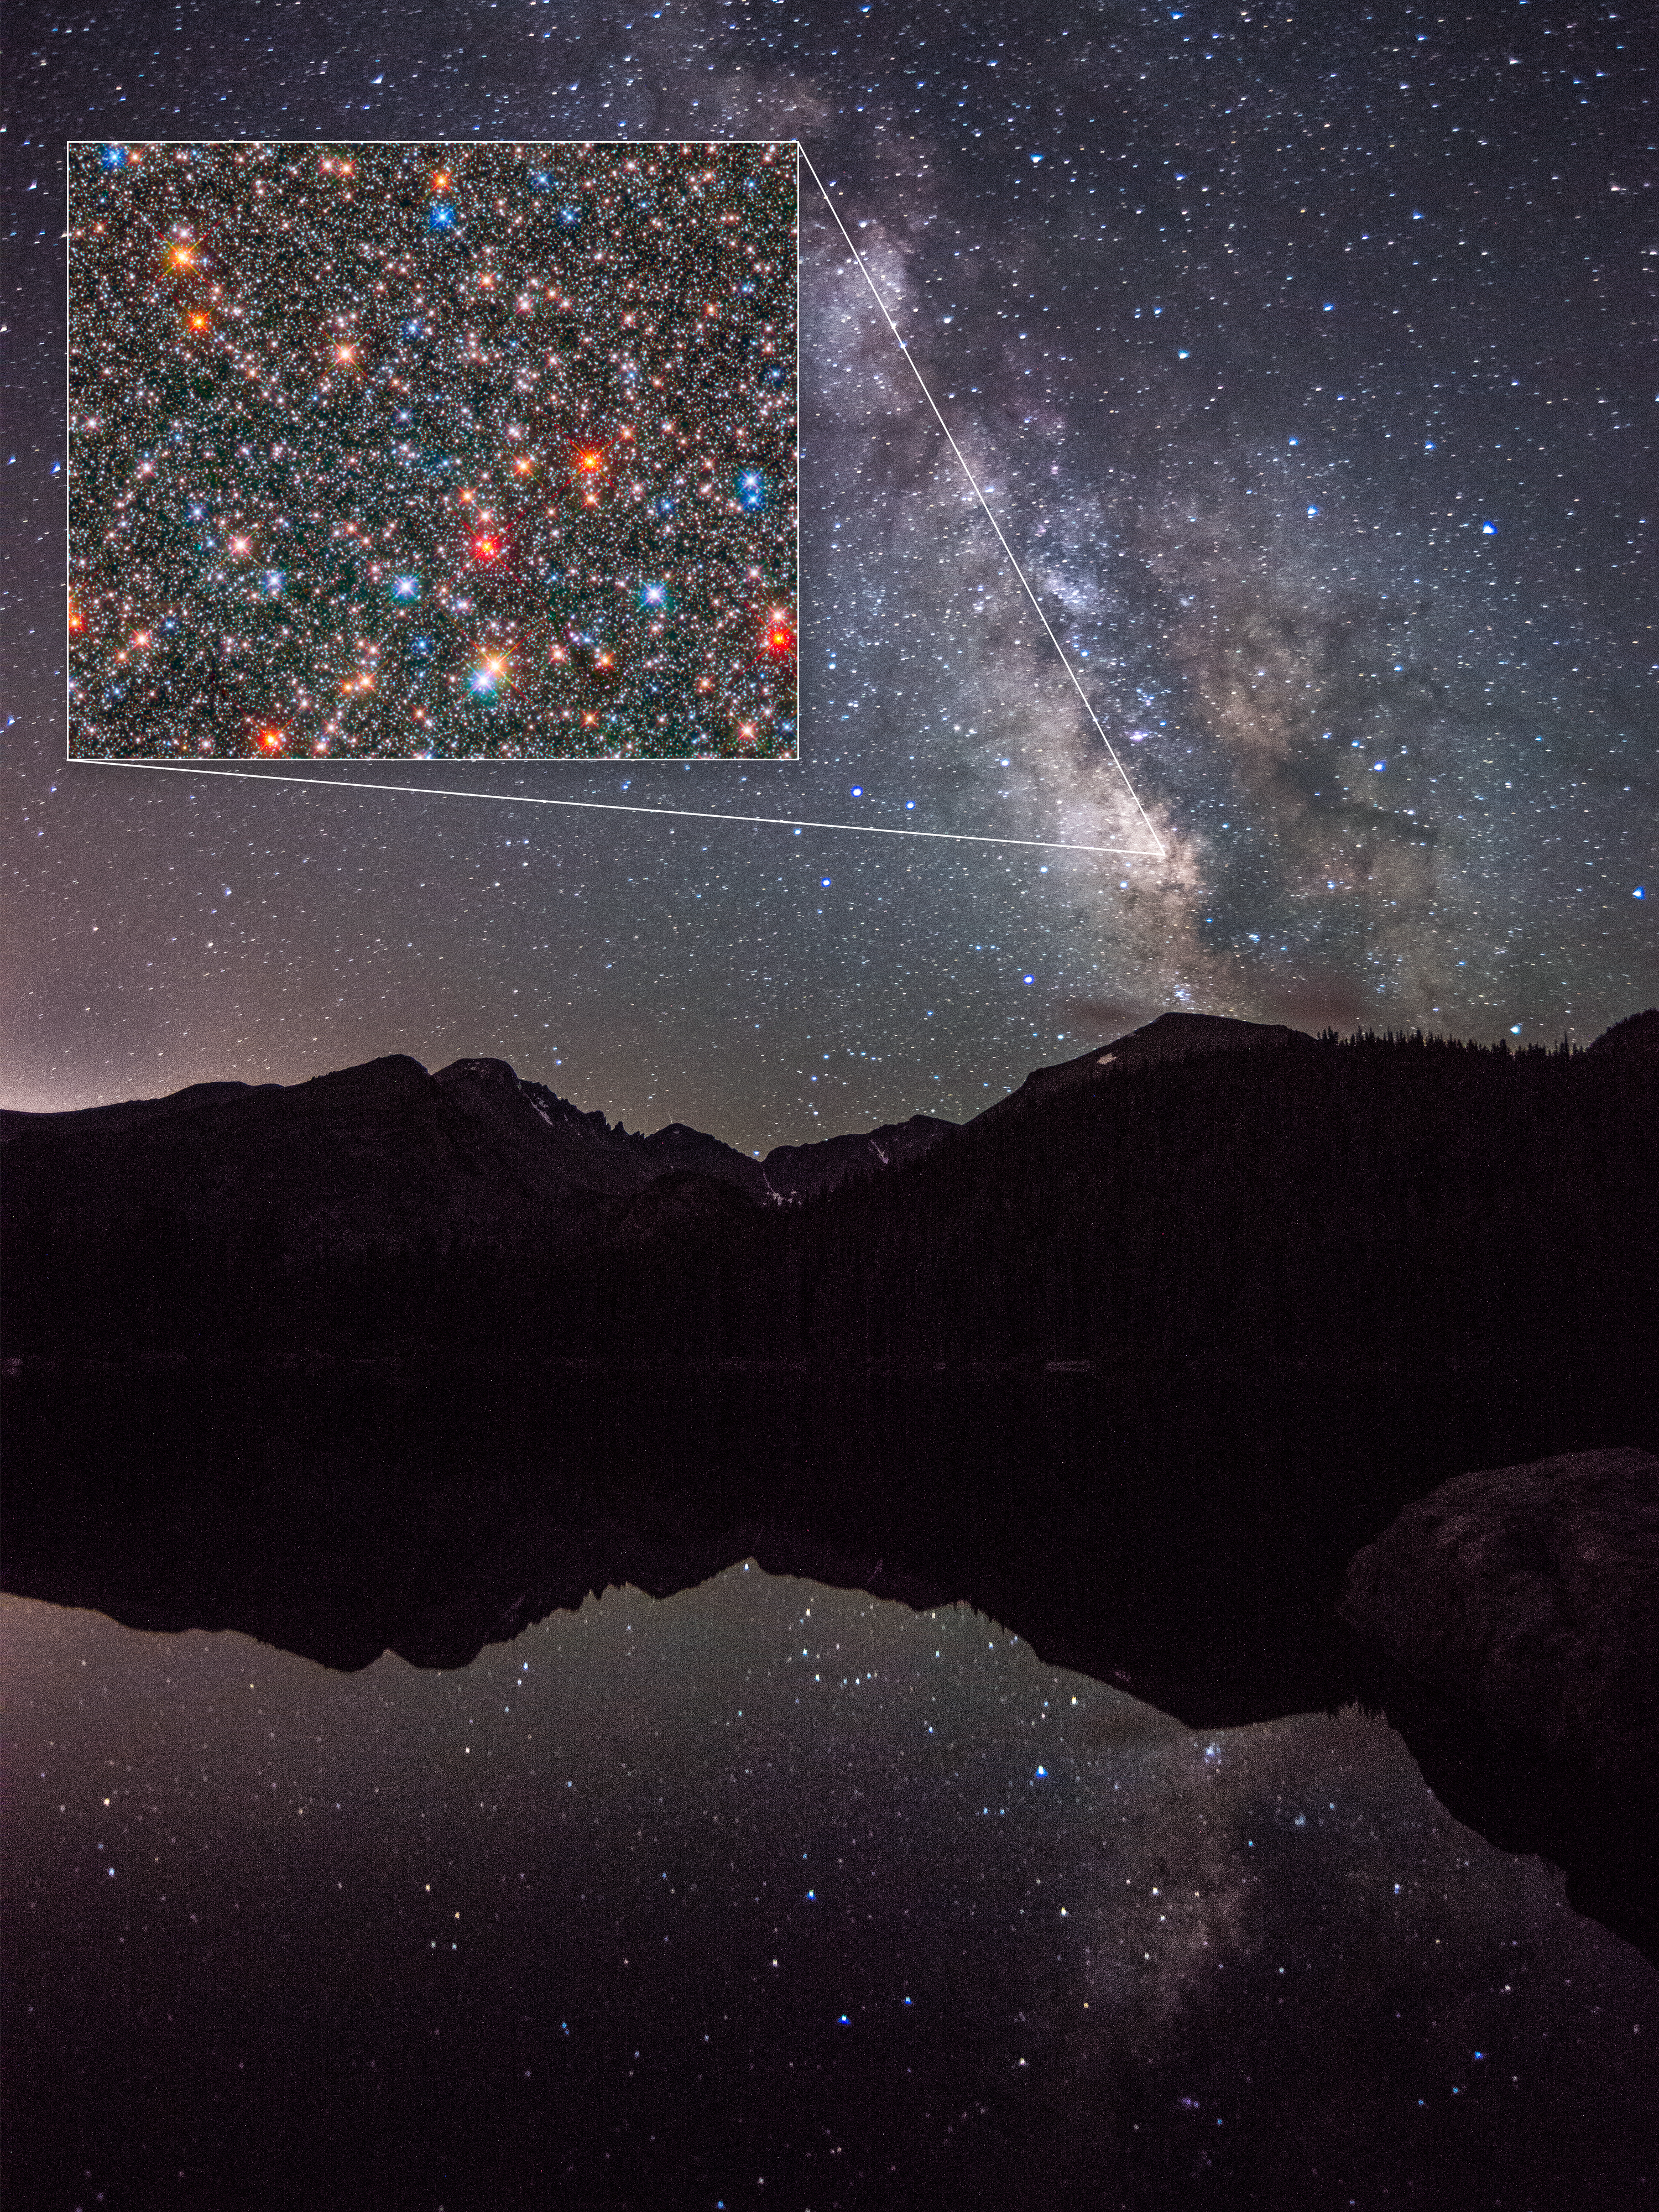

View of the heart of our Milky Way from Earth

The vast edge-on stretch of our home galaxy, the Milky Way, is seen intersecting the night sky above the silhouetted Rocky Mountains in this photograph. The Milky Way noticeably widens at lower right. This wider area is the central hub, or bulge, of our galaxy.

Peering into a very narrow region of the core, astronomers used the NASA/ESA Hubble Space Telescope to study the compositions and motions of 10 000 Sun-like stars, as seen in the inset Hubble image. The analysis reveals that our galaxy's bulge is an unexpectedly dynamic environment of stars of various ages zipping around at different speeds, like travelers bustling about a busy airport. The study yields important new clues to the complexity of the central bulge and our Milky Way's evolution over billions of years.

The Hubble image is a composite of exposures taken in near-infrared and visible light with Hubble's Wide Field Camera 3. The observations are part of two Hubble surveys: the Galactic Bulge Treasury Program and the Sagittarius Window Eclipsing Extrasolar Planet Search.

The centre of our galaxy is about 26 000 light-years away.

Credit: NASA, ESA, and Z. Levay (STScI)